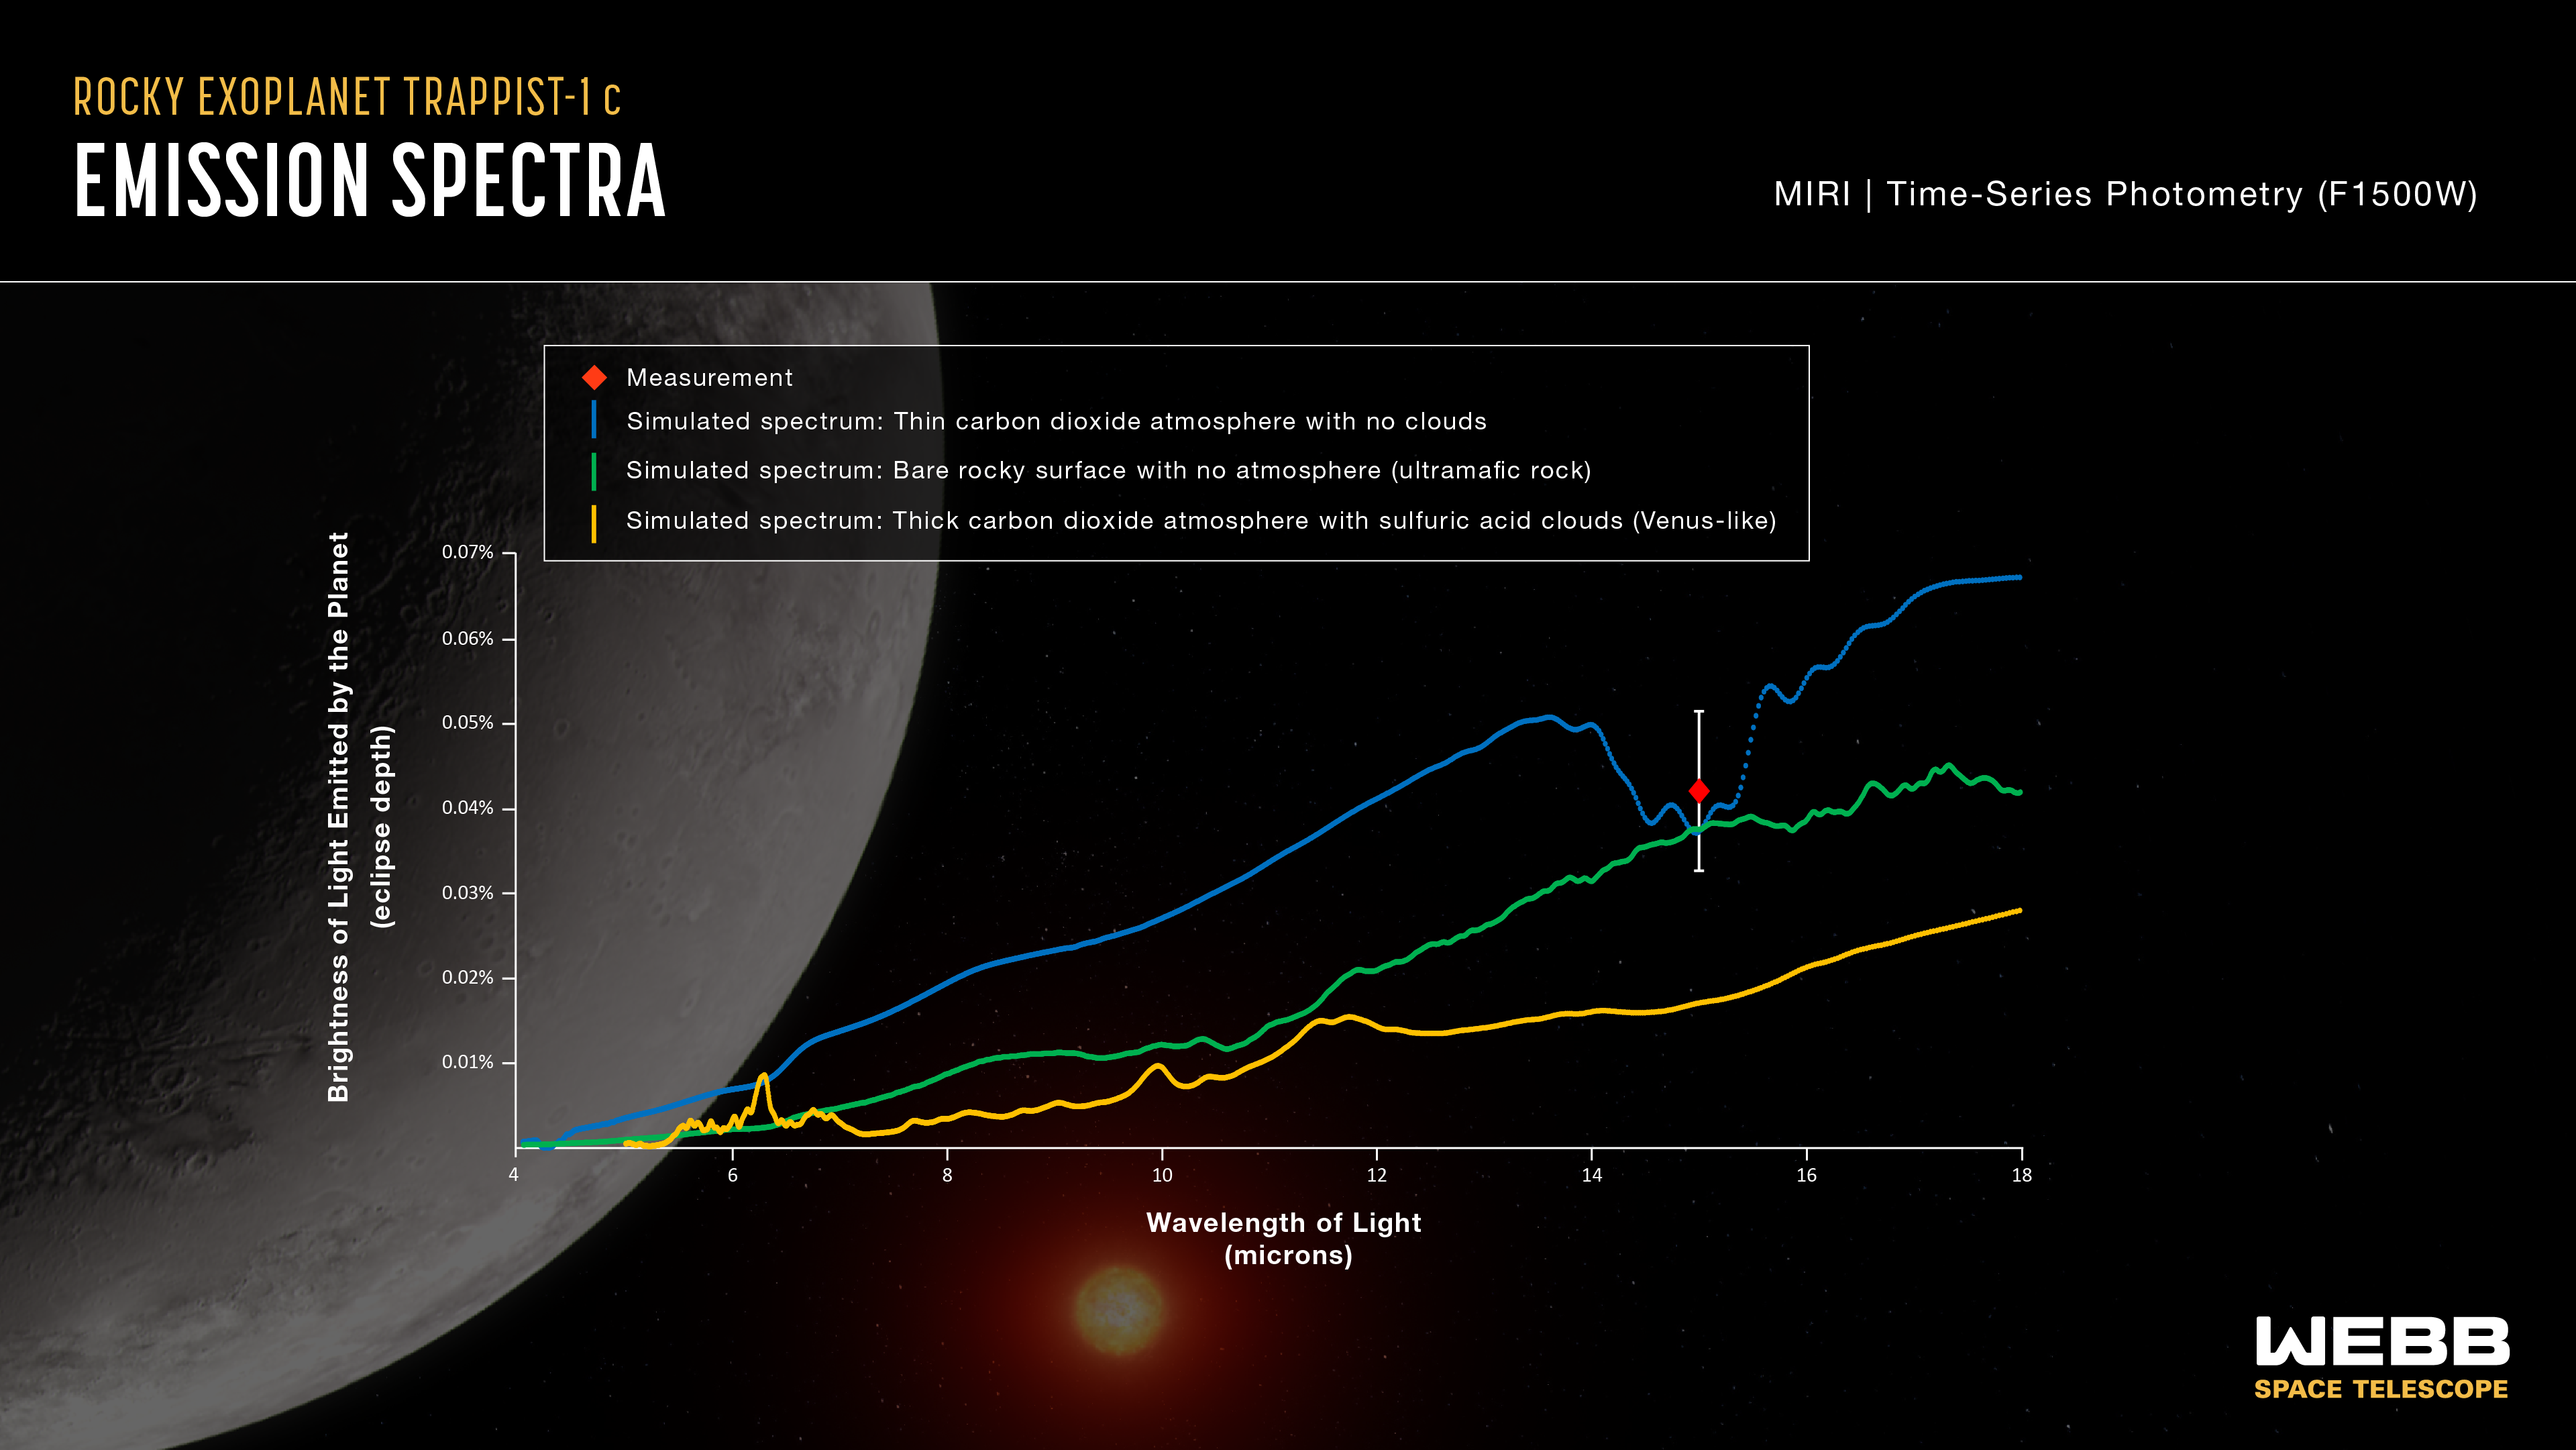

TRAPPIST-1 c emission spectra

This graph compares the measured brightness of TRAPPIST-1 c to simulated brightness data for three different scenarios. The measurement (red diamond) is consistent with a bare rocky surface with no atmosphere (green line) or a very thin carbon dioxide atmosphere with no clouds (blue line). A thick carbon dioxide-rich atmosphere with sulphuric acid clouds, similar to that of Venus (yellow line), is unlikely.

The y-axis of the graph shows brightness (also called intensity or flux) of light in terms of eclipse depth, which is the difference between the combined brightness of the star and planet (when the planet is beside the star) and the brightness of the star on its own (when the planet is behind the star). Brightness increases from bottom to top on the graph: The greater the eclipse depth, the brighter the light from the planet. The x-axis shows the wavelength (or colour) of light being measured. All of the wavelengths shown here are in the infrared, which is invisible to human eyes.

The brightness of light emitted by the planet varies with wavelength: Some colours are brighter than others. The pattern of brightness (the spectrum) depends on factors such as the type of rock that makes up the surface, what the atmosphere is made of, and whether or not there are clouds. Different materials absorb and emit different amounts of different wavelengths of light.

The red diamond shows the brightness of TRAPPIST-1 c as measured using the F1500W filter on MIRI (Webb’s Mid-Infrared Instrument). The vertical lines extending above and below the diamond are error bars. The width of the blue box covers the range of wavelengths that were measured using MIRI’s F1500W filter, which allows light with wavelengths ranging from about 13.5 - 16.7 microns to pass through to the detectors.

The blue line shows what the emission spectrum of the planet’s dayside would look like assuming it has an oxygen atmosphere with 0.01% carbon dioxide, a surface pressure of 0.1 bars, and no clouds. (For reference, this is significantly thinner than Earth’s atmosphere, which is nitrogen- and oxygen-rich, with 0.04% carbon dioxide and a surface pressure of 1 bar.)

The green line shows what the emission spectrum of the planet’s dayside would be if it has no atmosphere and a rocky surface made of ultramafic rock. (Ultramafic rock is a type of igneous rock that is somewhat richer in iron and magnesium and poorer in silica than basalt, which makes up the crust beneath Earth’s oceans.)

The orange line shows the emission spectrum of the planet’s dayside if it had an atmosphere closer to that of Venus, with 96.5% carbon dioxide, a surface pressure of 10 bars, and sulphuric acid clouds.

Credit: NASA, ESA, CSA, J. Olmsted (STScI), S. Zieba (MPI-A), L. Kreidberg (MPI-A)